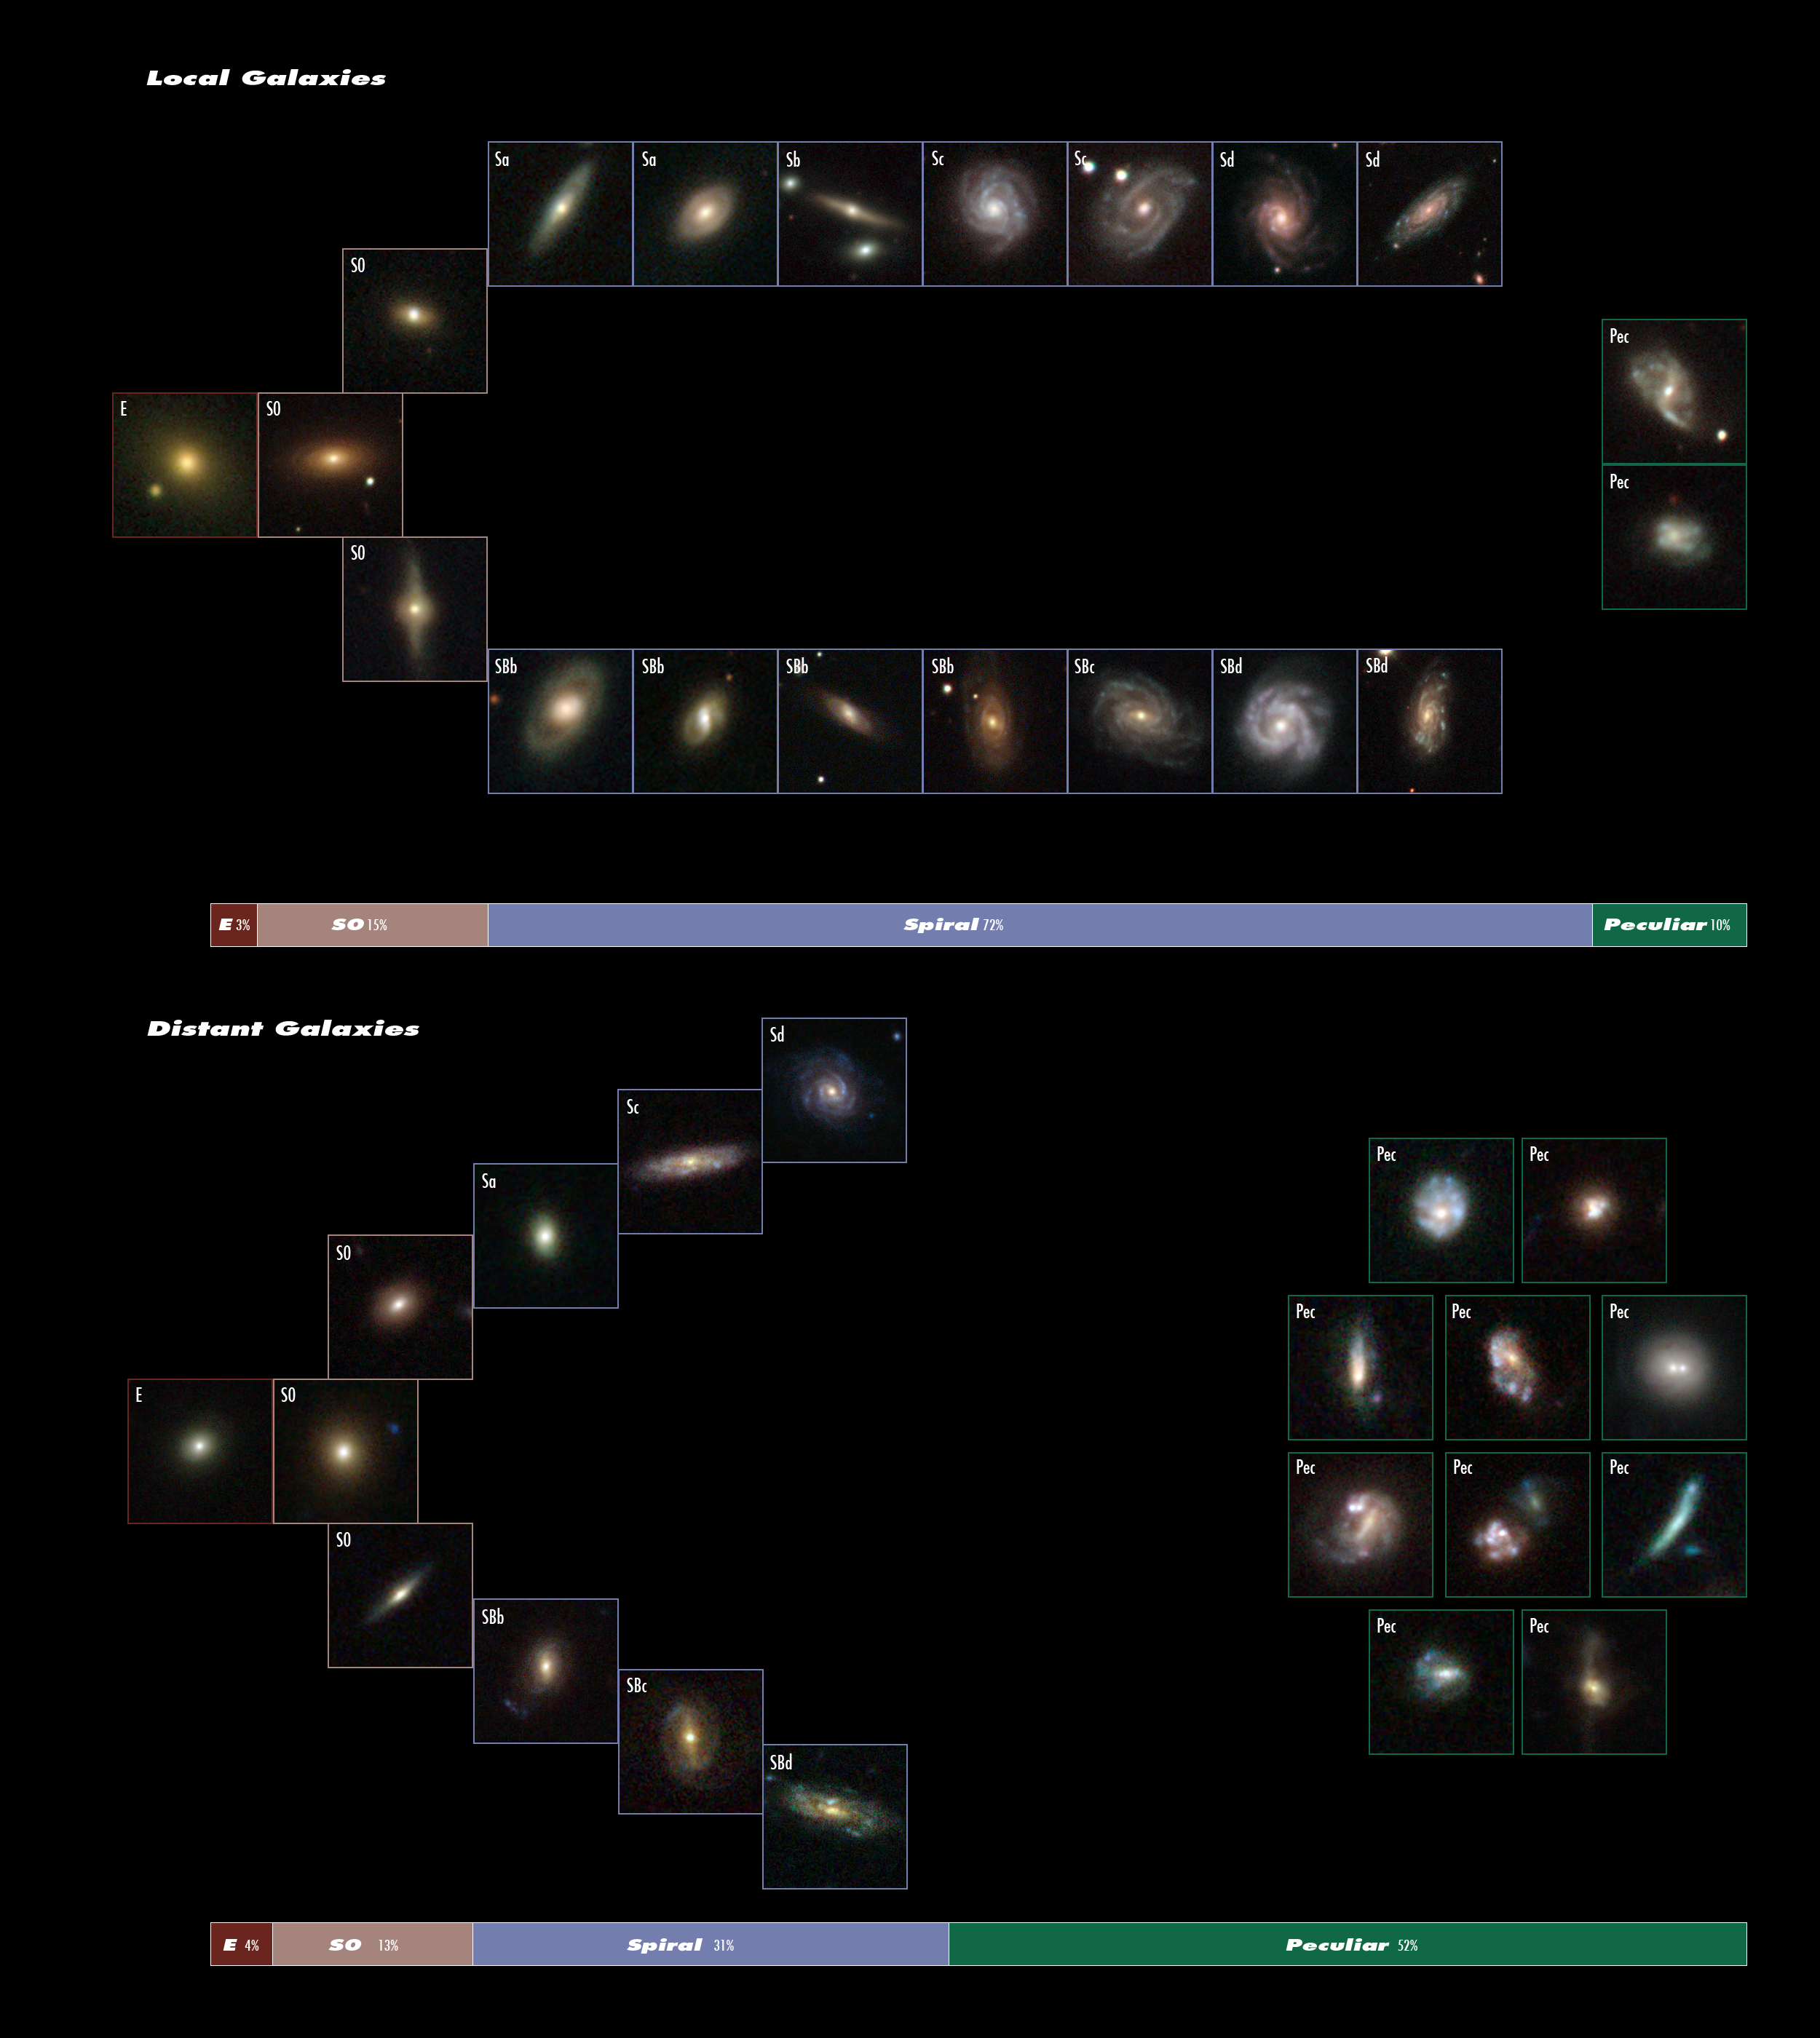

The evolution of the Hubble sequence

This image created from data taken from both the NASA/ESA Hubble Space Telescope and the Sloan Digital Sky Survey demonstrates that the Hubble sequence six billion years ago was very different from the one that astronomers see today. The two sections show how many more peculiar shaped galaxies (marked Pec) are seen among distant galaxies, as opposed to among local galaxies. The data organisation follows the Hubble tuning-fork classification scheme invented in 1926 by the same Edwin Hubble in whose honour the space telescope is named.

The top image represents the current — or local — Universe. Using their sample, researchers found that 3 percent of galaxies were elliptical (marked E), 15 percent lenticular (marked S0), 72 percent spiral (marked Sa to Sd, or SBb to SBd) and 10 percent peculiar (marked Pec).

The bottom image represents the make up of the distant galaxies (six billion years ago), showing a much larger fraction of peculiar galaxies. The census found 4 percent of distant galaxies were elliptical, 13 percent lenticular (S0), 31 percent spiral and 52 percent peculiar. This implies that many of the peculiar galaxies ultimately become large spirals. According to the "spiral rebuilding" hypothesis, devised by the astronomers François Hammer, Rodney Delgado-Serrano and their group, this is due to the large number of major, gas-rich galaxy mergers between galaxies that were previously labelled "peculiar" in the distant Universe. It is thought that the large Andromeda galaxy from our neighbourhood formed in this manner.

In total, 116 local galaxies and 148 distant galaxies were sampled. Spiral galaxies are further classified by labels that characterise their appearance; for example, an SBd galaxy means that it is a spiral galaxy that has slightly looser "arms" than an SBa galaxy and a less prominent bulge.

These images were created from data that are part of large sky surveys undertaken by the NASA/ESA Hubble Space Telescope and the 2.5-metre telescope at Apache Point Observatory, New Mexico, USA (Sloan Digital Sky Survey).

Credit: NASA, ESA, Sloan Digital Sky Survey, R. Delgado-Serrano and F. Hammer (Observatoire de Paris)